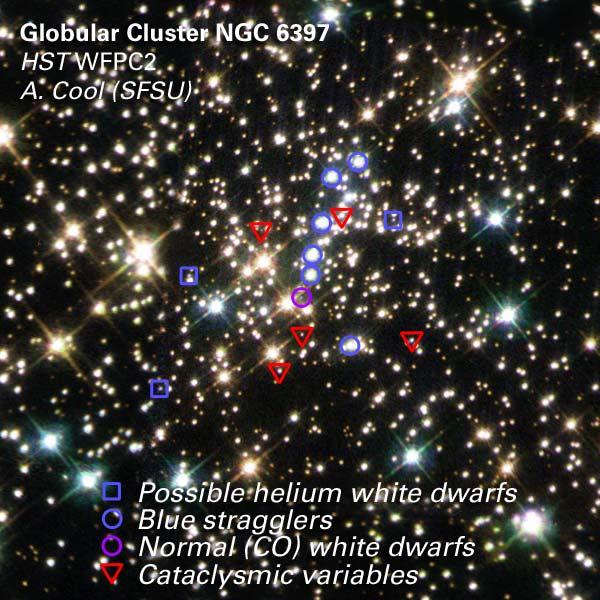

Stars Identified in the Center of NGC 6397

Four types of stars reside within the center of the globular cluster NGC 6397. They have been identified in the accompanying image as: 1) helium white dwarfs; 2) blue stragglers; 3) normal white dwarfs; and 4) cataclysmic variables.

1) Helium white dwarfs (blue squares): Three faint blue stars that do not vary in brightness can be seen near the center of the cluster. These stars may be very-low-mass white dwarfs, formed in the cores of giant stars whose evolution is somehow interrupted by a stellar collision or an interaction with a binary companion. When a giant star interacts with another star, it can lose its outer layers prematurely, exposing its hot, blue core.

Credit: NASA/ESA, A. Cool (SFSU) and Z. Levay (STScI)